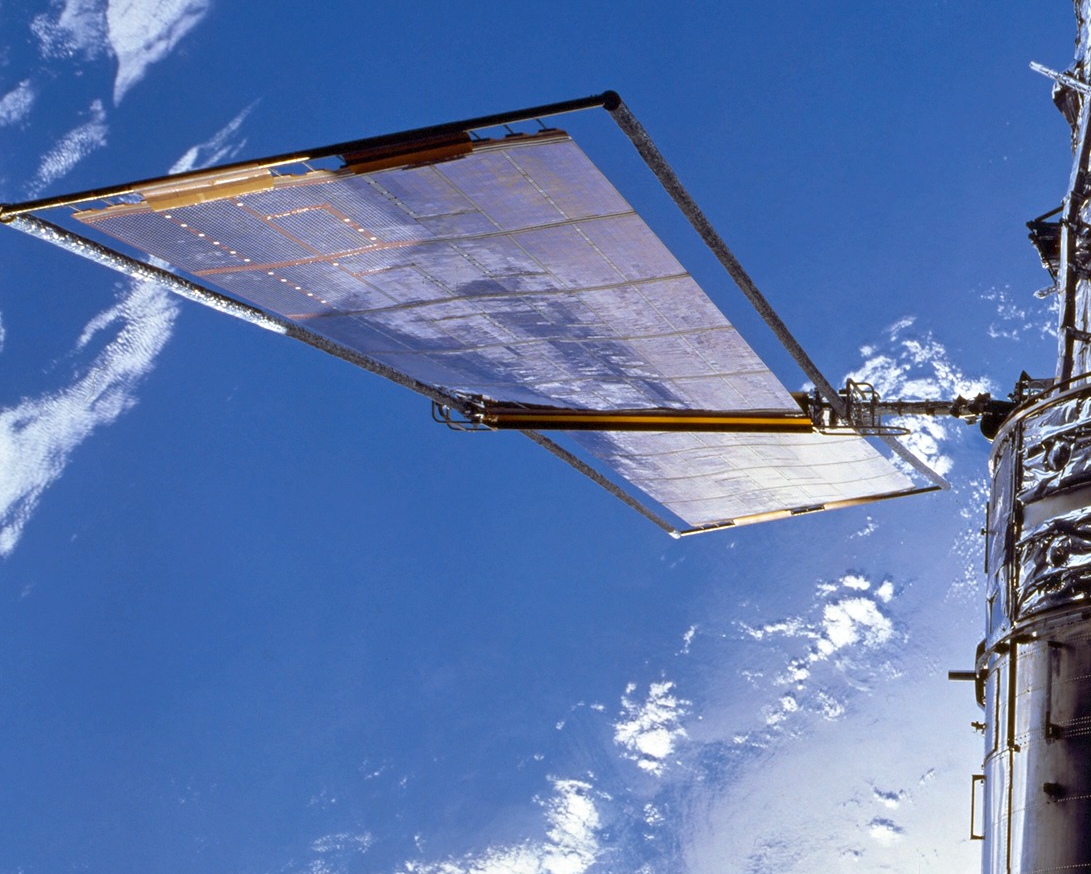

Solar Array

A close-up view of one of the solar arrays.

Credit: NASA/ESA